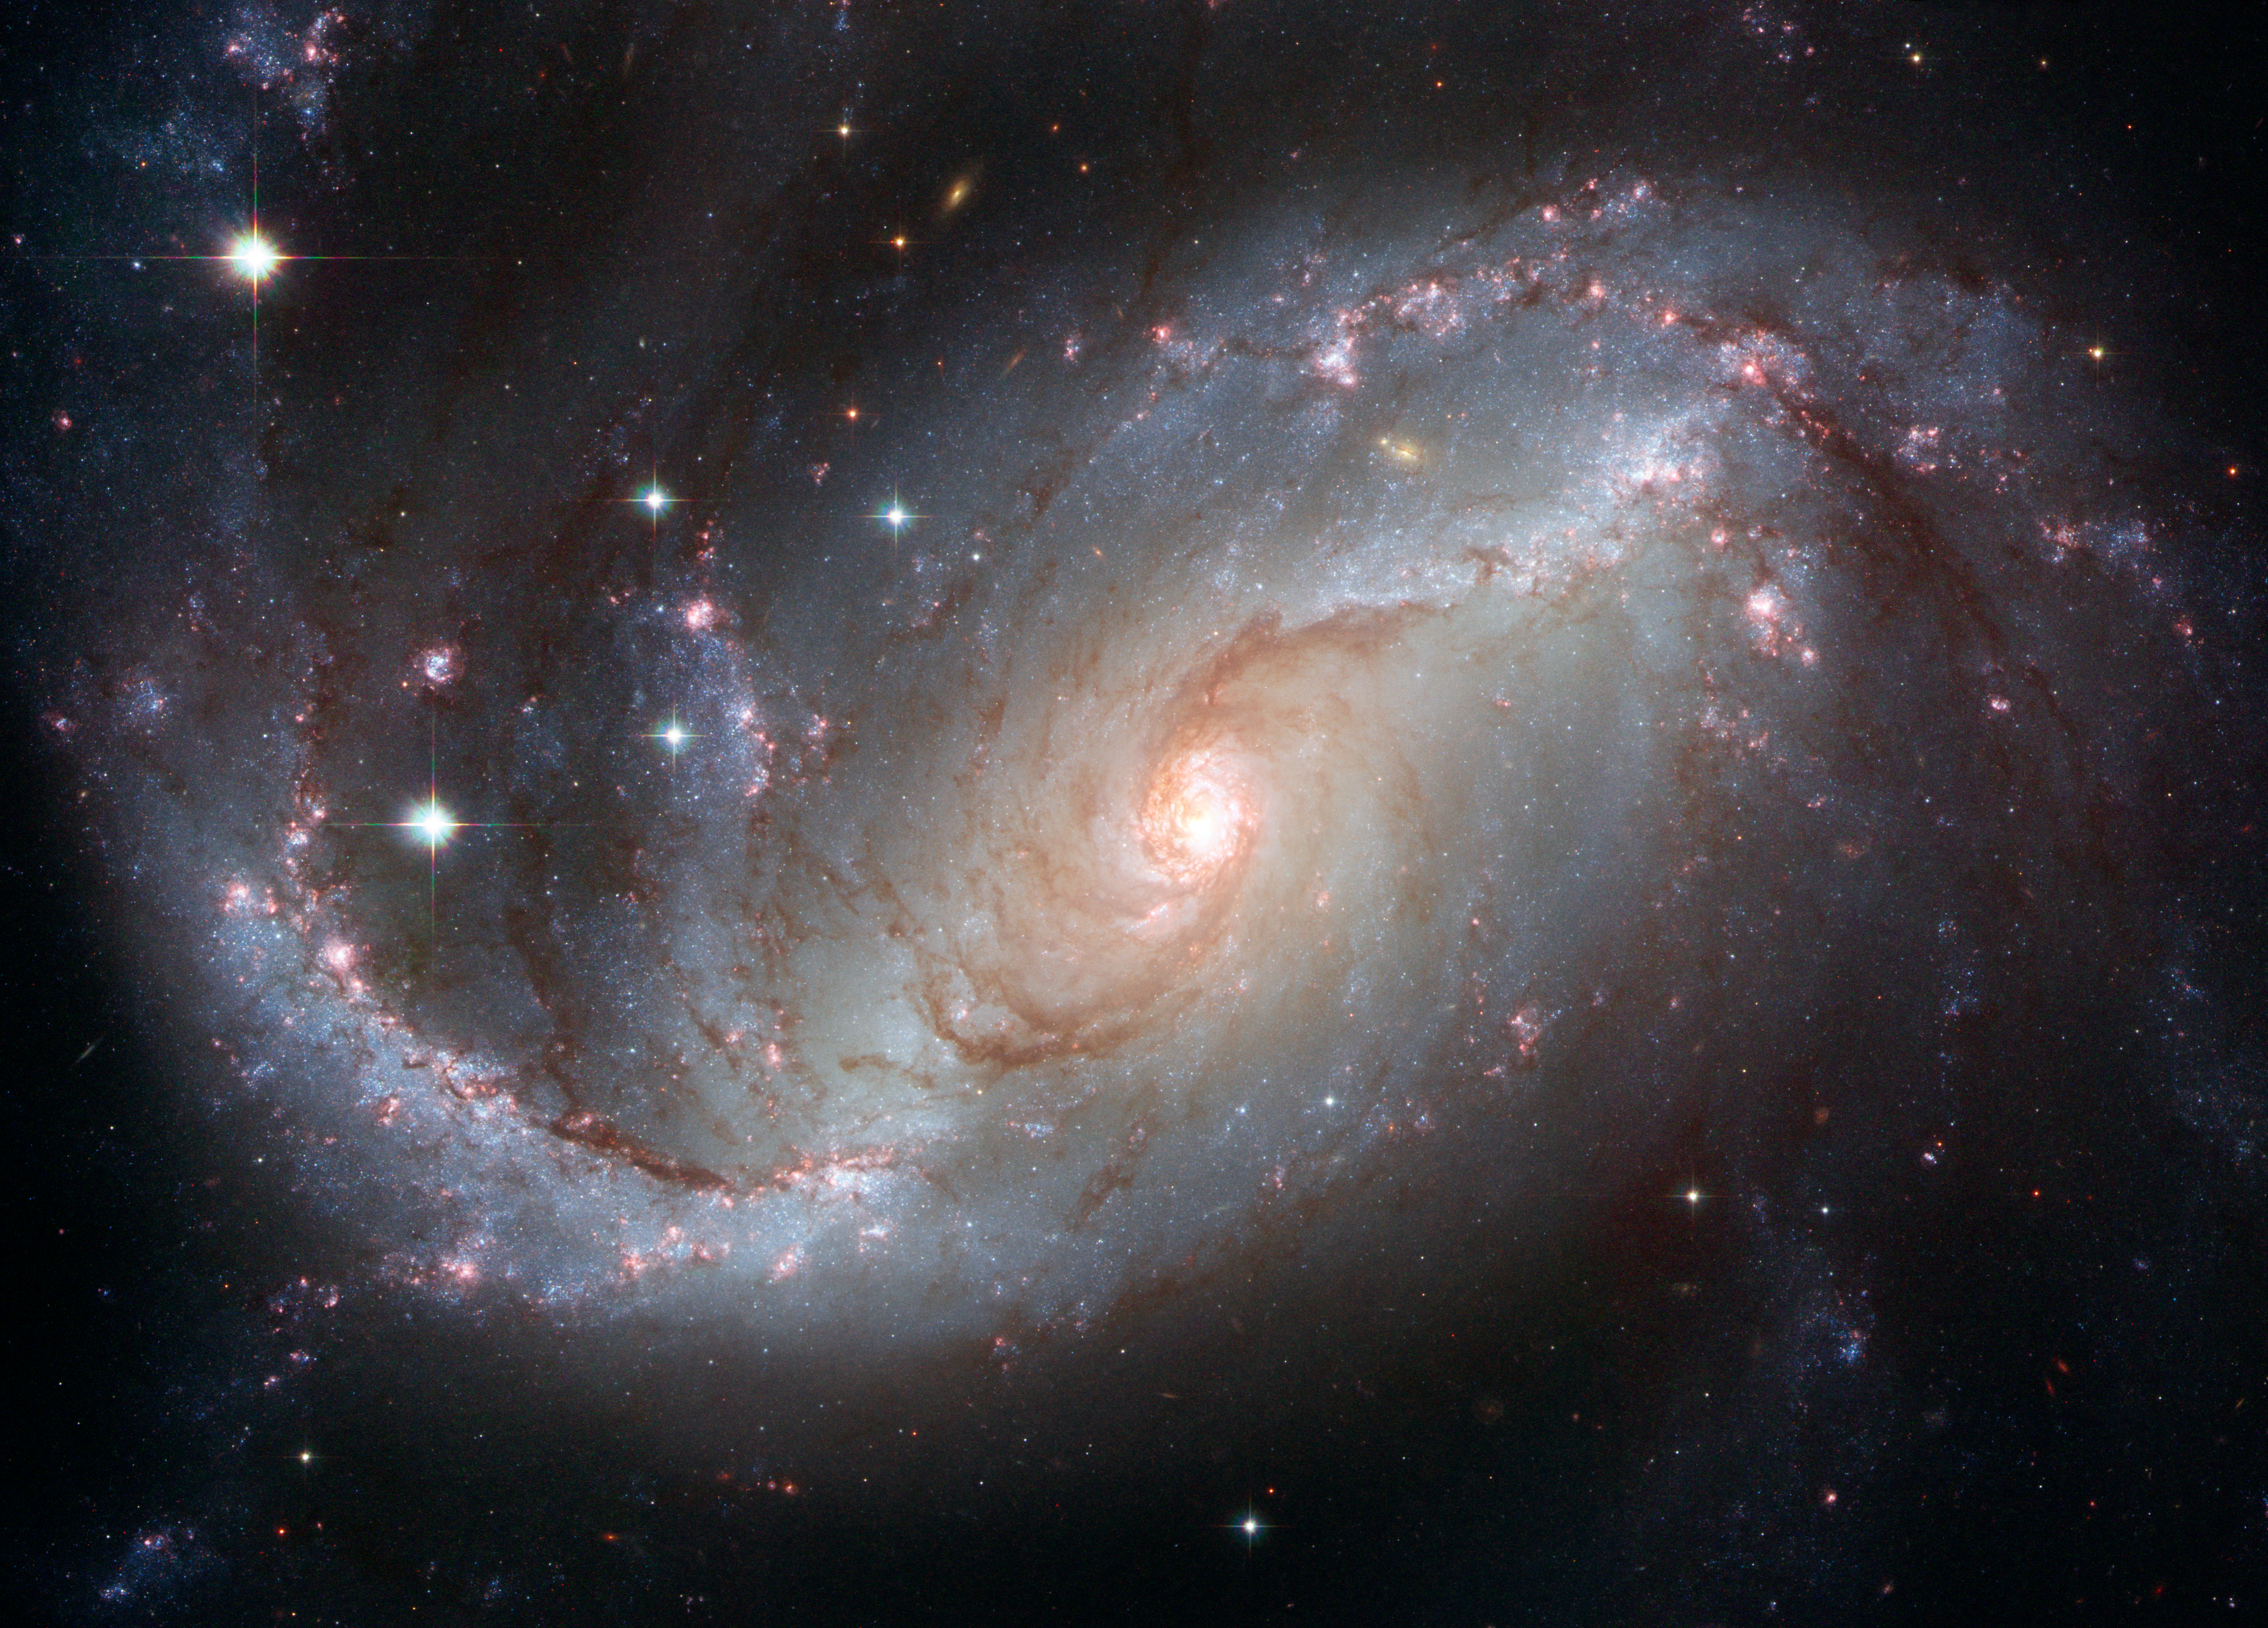

Stellar nursery in the arms of NGC 1672

The barred spiral galaxy NGC 1672, showing up clusters of hot young blue stars along its spiral arms, and clouds of hydrogen gas glowing in red. Delicate curtains of dust partially obscure and redden the light of the stars behind them. NGC 1672's symmetric look is emphasised by the four principal arms, edged by eye-catching dust lanes that extend out from the centre.

Credit: NASA, ESA